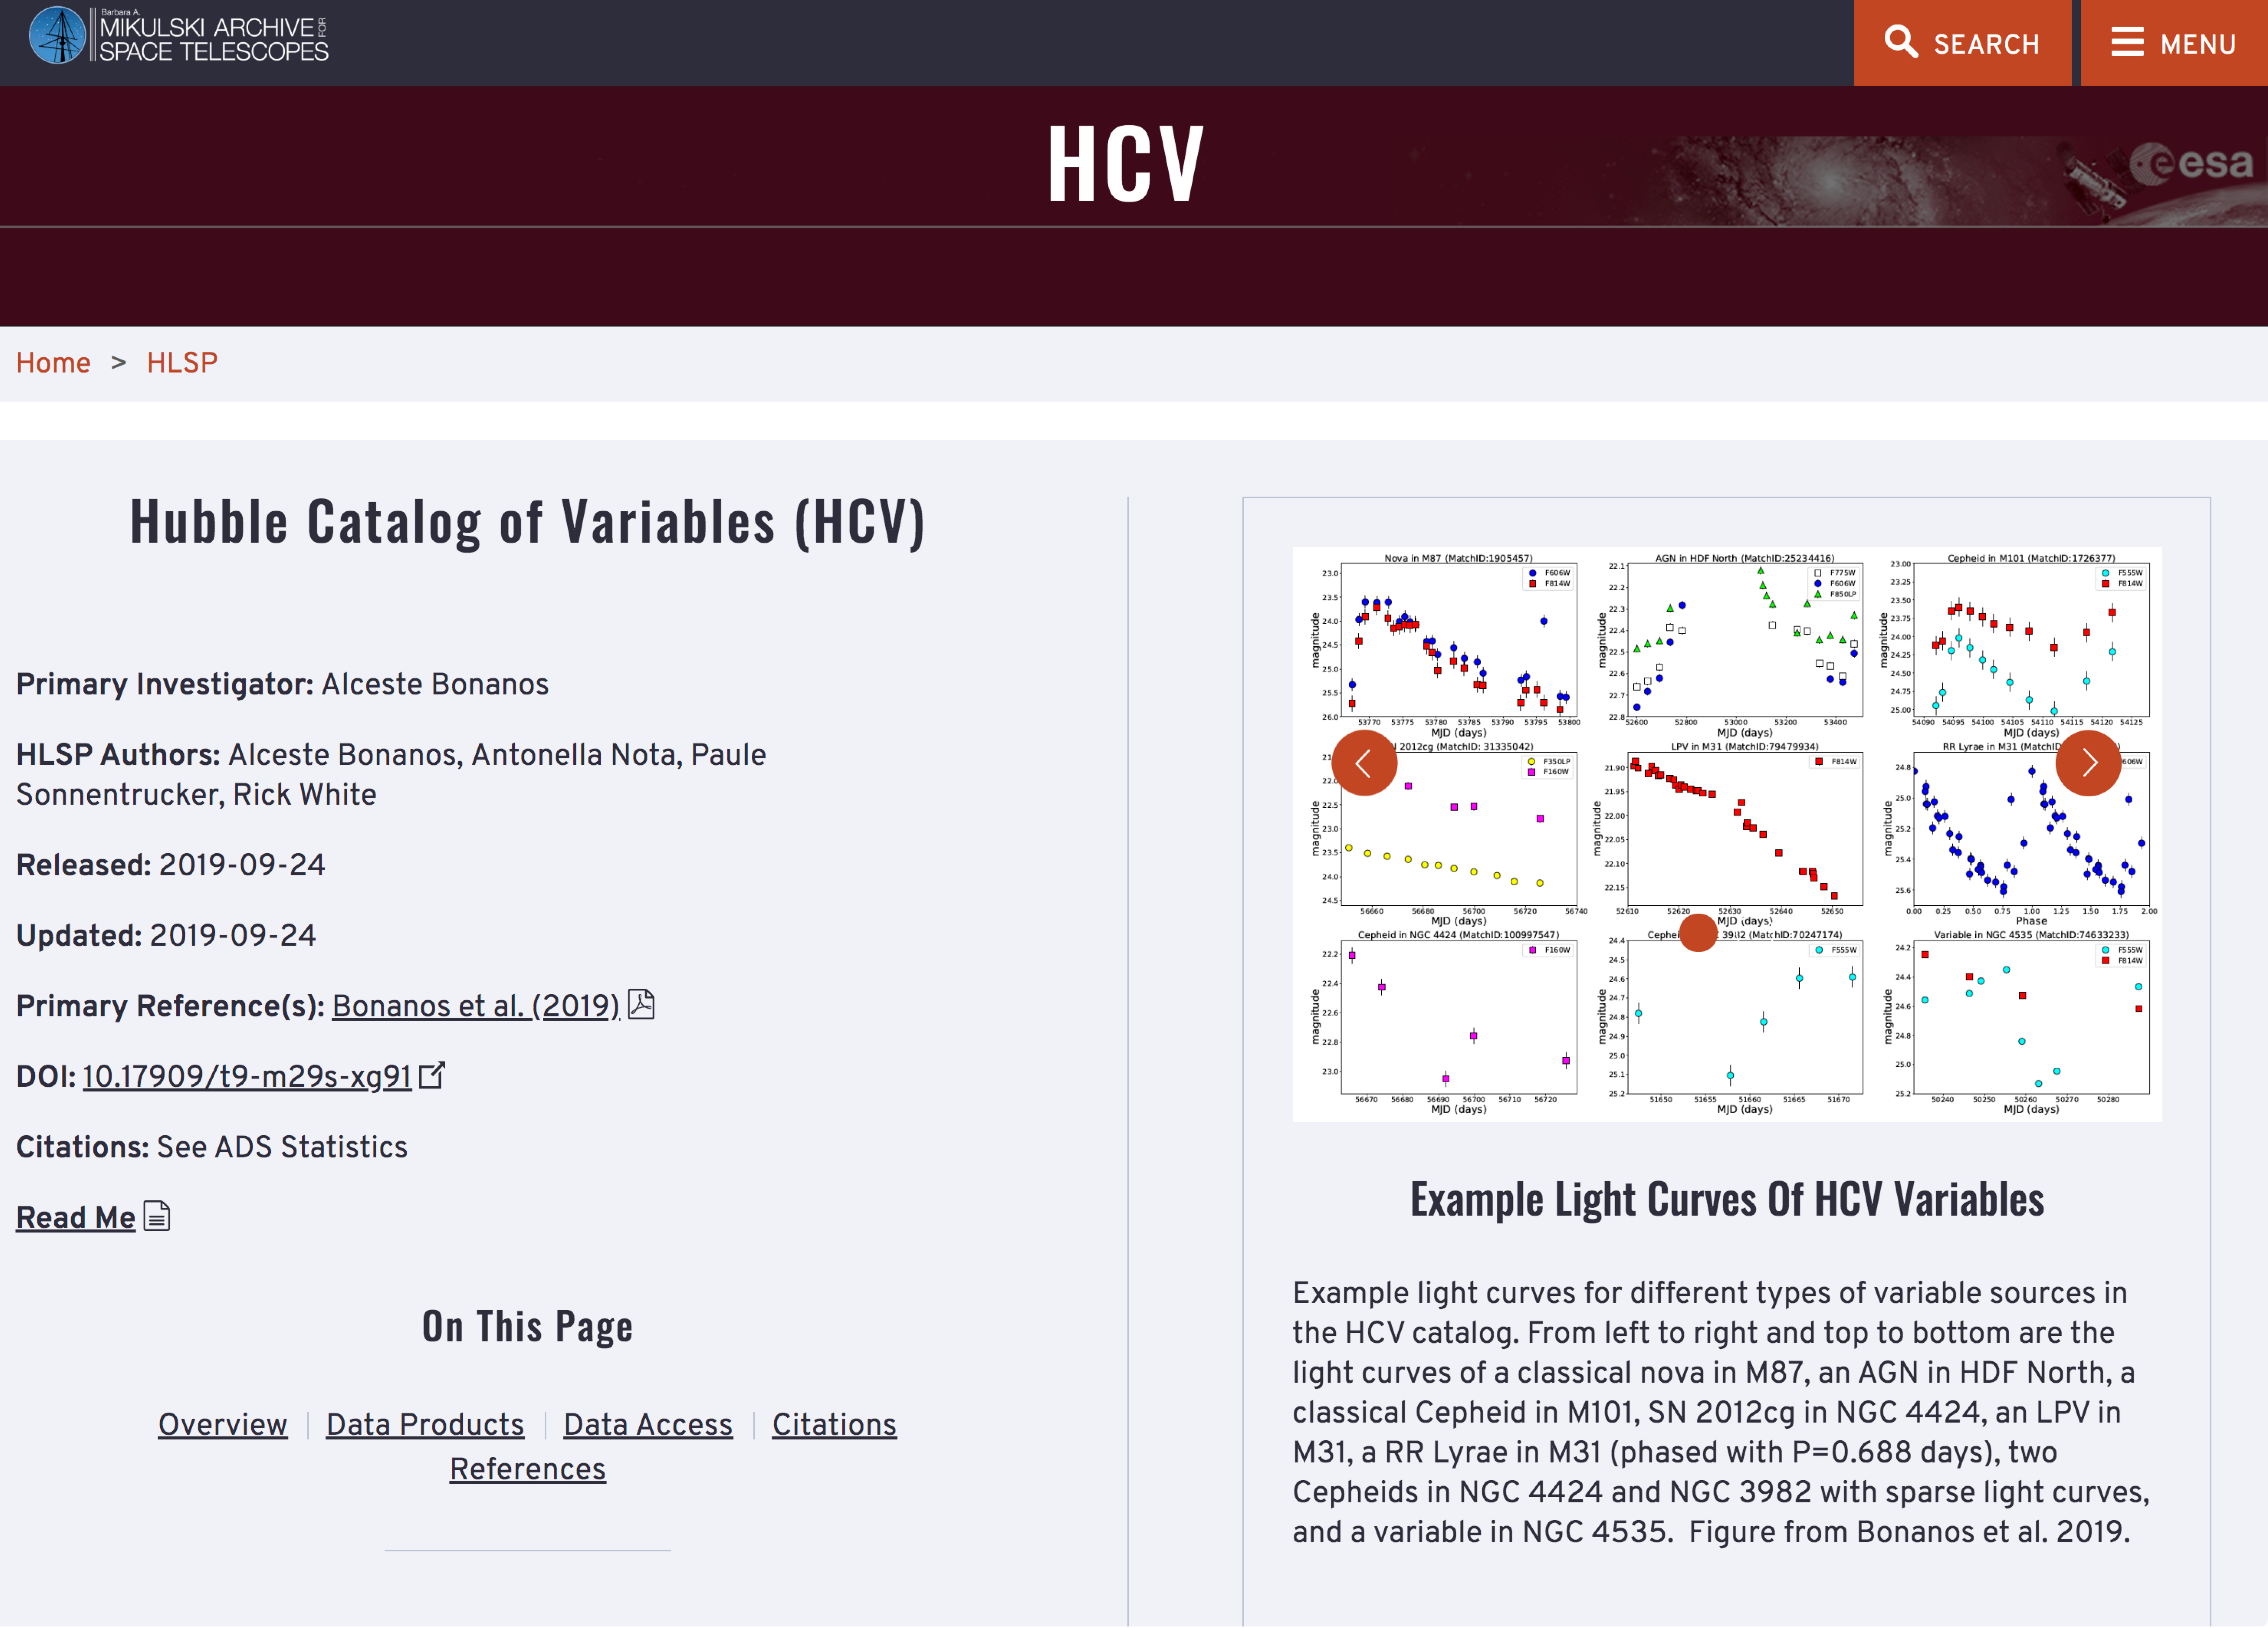

Screenshot of the HCV Explorer tool

Screenshot of the HCV Explorer tool. Variability index plot in context with filter ACS_F555W, group 1043384,subgroup 1 and source 94575740 selected.

Credit: ESA/Hubble